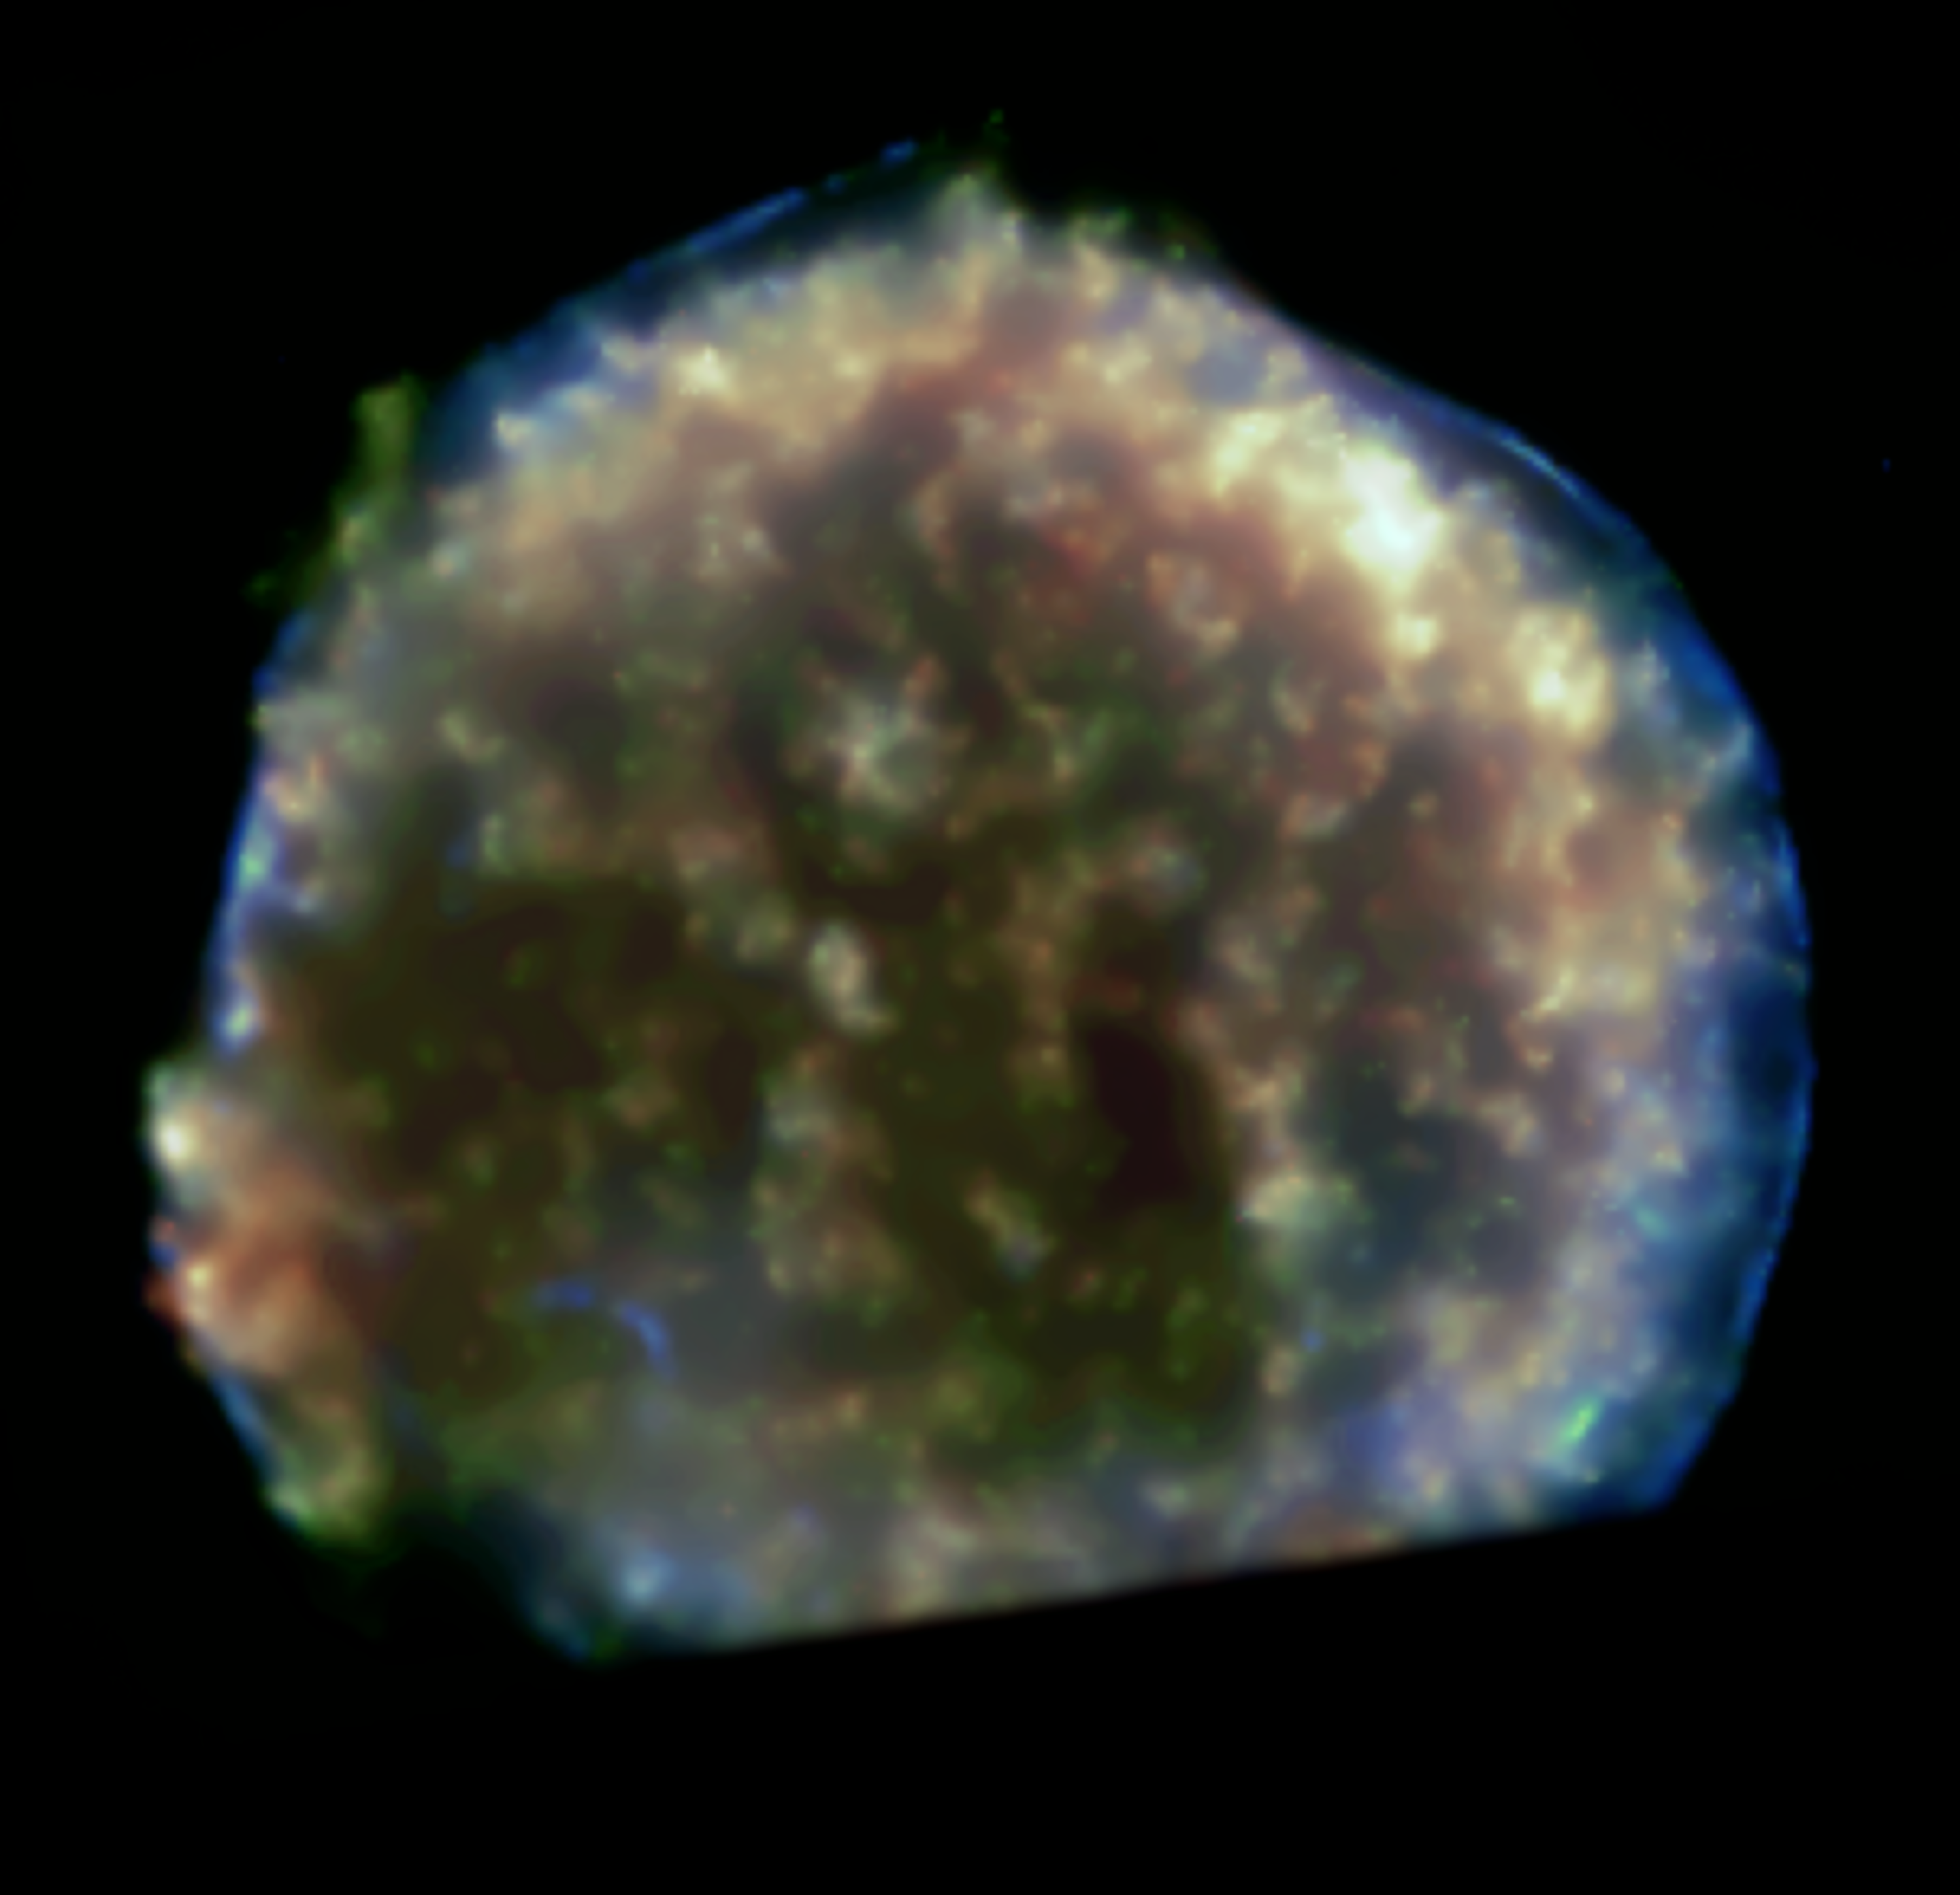

Expanding Bubble of Tycho's Supernova [Chandra]

This is a wide-field view of the region around Tycho's Supernova showing the expanding bubble of the supernova explosion. The colours in this Chandra X-Ray image of the hot bubble show different X-ray energies, with red, green, and blue representing low, medium, and high energies, respectively. (The image is cut off at the bottom because the southernmost region of the remnant fell outside the field of view of the Chandra camera.)

Credit: NASA/ESA, CXO and P. Ruiz-Lapuente (University of Barcelona)